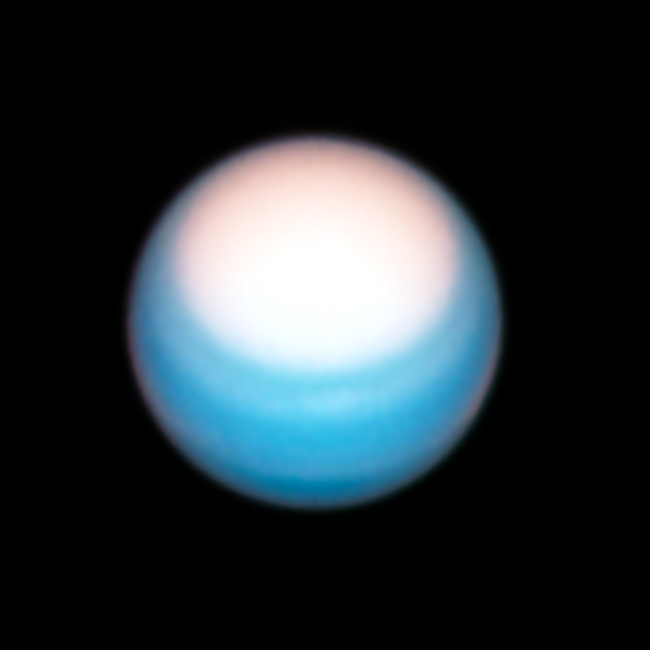

Hubble’s Observation of Uranus in 2021

Hubble’s 25 October view of Uranus puts the planet’s bright northern polar hood in the spotlight. It’s springtime in the northern hemisphere and the increase in ultraviolet radiation from the Sun seems to be causing the polar region to brighten. Researchers aren’t sure why. It could be a change in the opacity of atmospheric methane haze, or some variation in the aerosol particles. Curiously, even as the atmospheric hood gets brighter, the sharp southernmost boundary remains at the same latitude. This has been constant over the past several years of Hubble observations of the planet. Perhaps some sort of jetstream is setting up a barrier at that latitude of 43 degrees.

Credit: NASA, ESA, A. Simon (Goddard Space Flight Center), and M.H. Wong (University of California, Berkeley) and the OPAL team